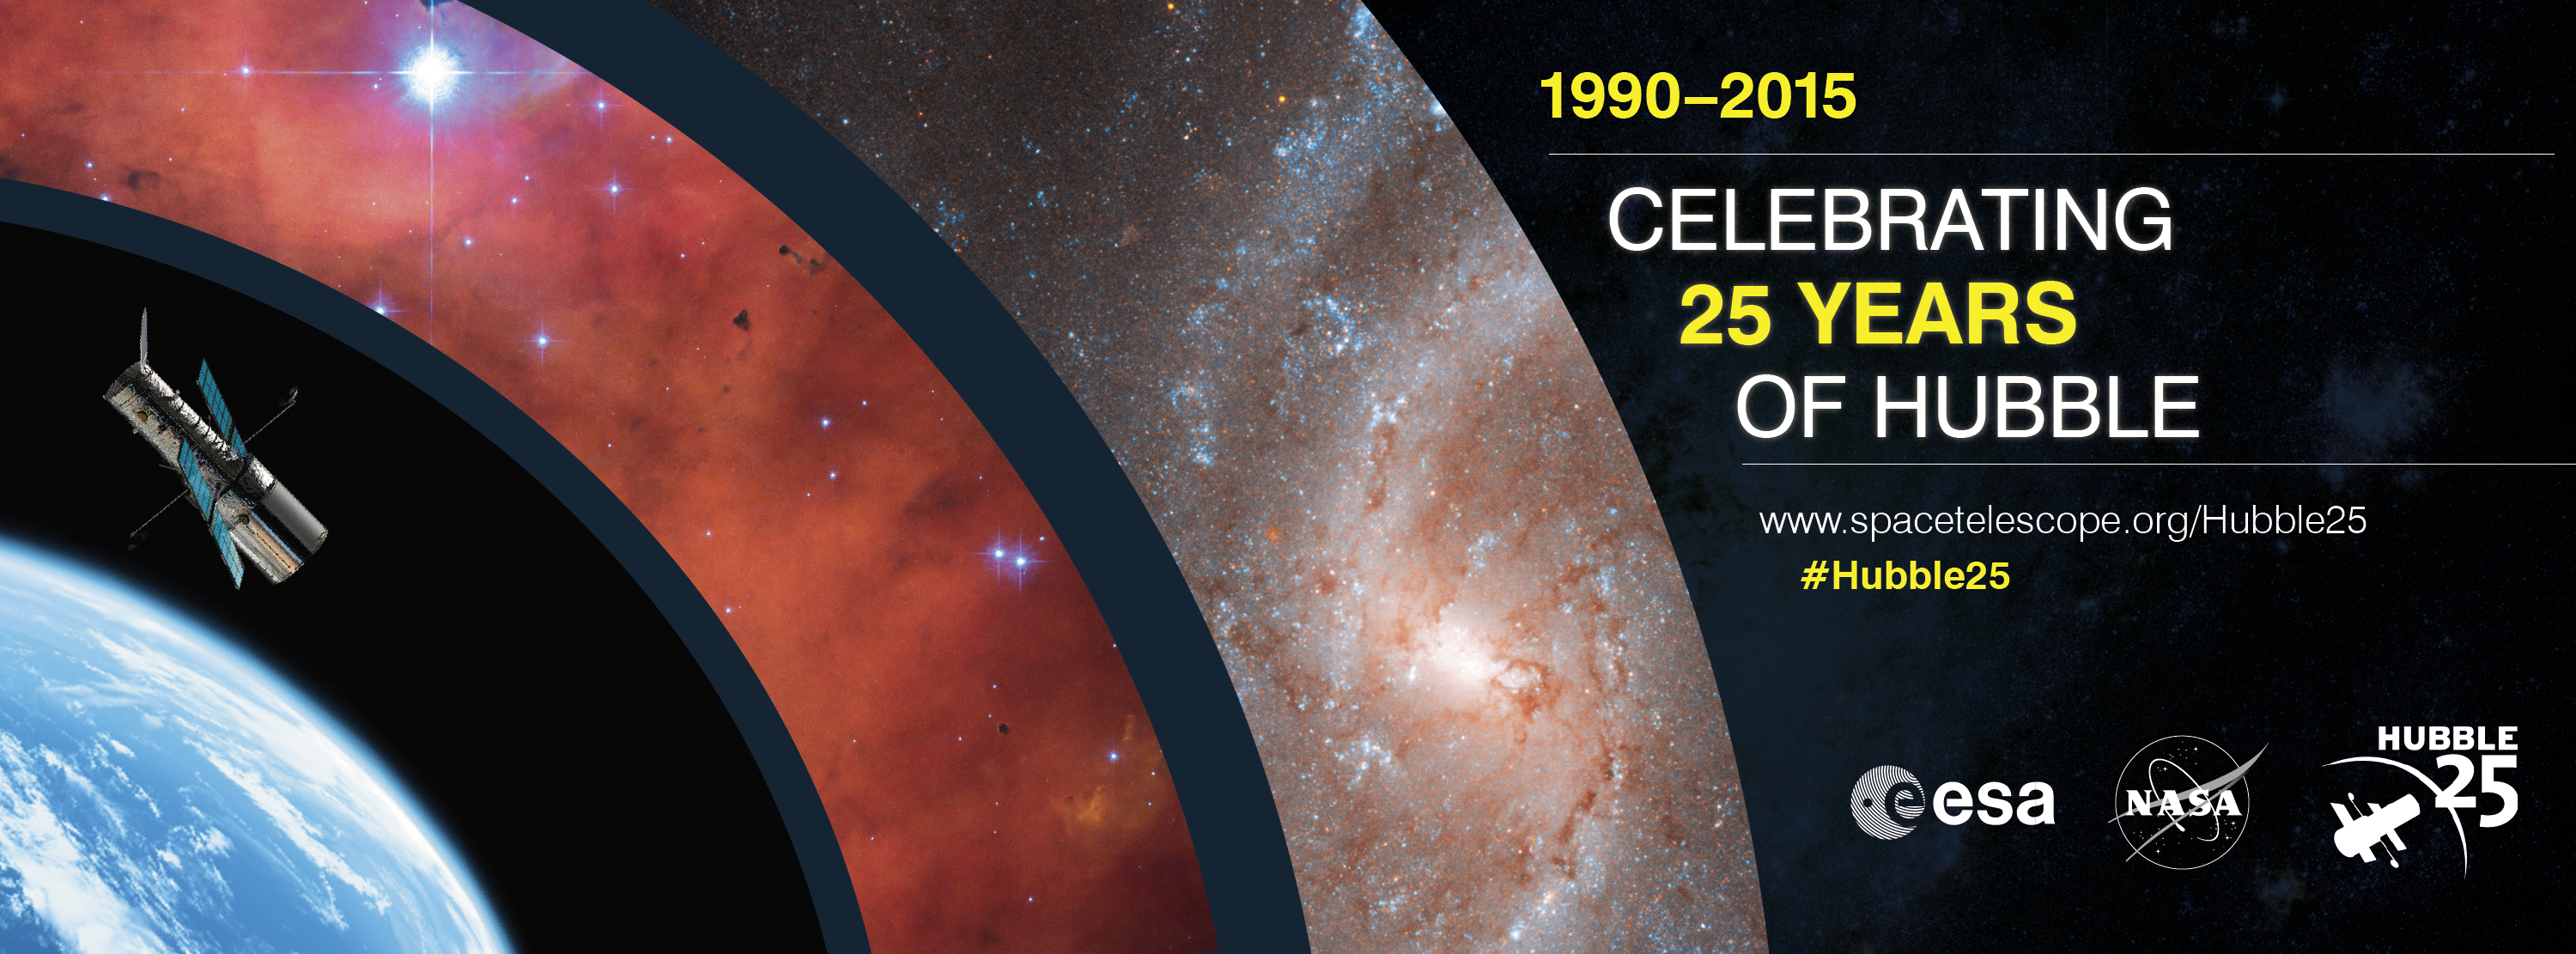

Hubble 25th anniversary

This graphic advertises the 25th anniversary of Hubble. 2015 will be filled with events and projects to celebrate the anniversary.

To find out more visit the anniversary webpage.

Credit: NASA, ESA